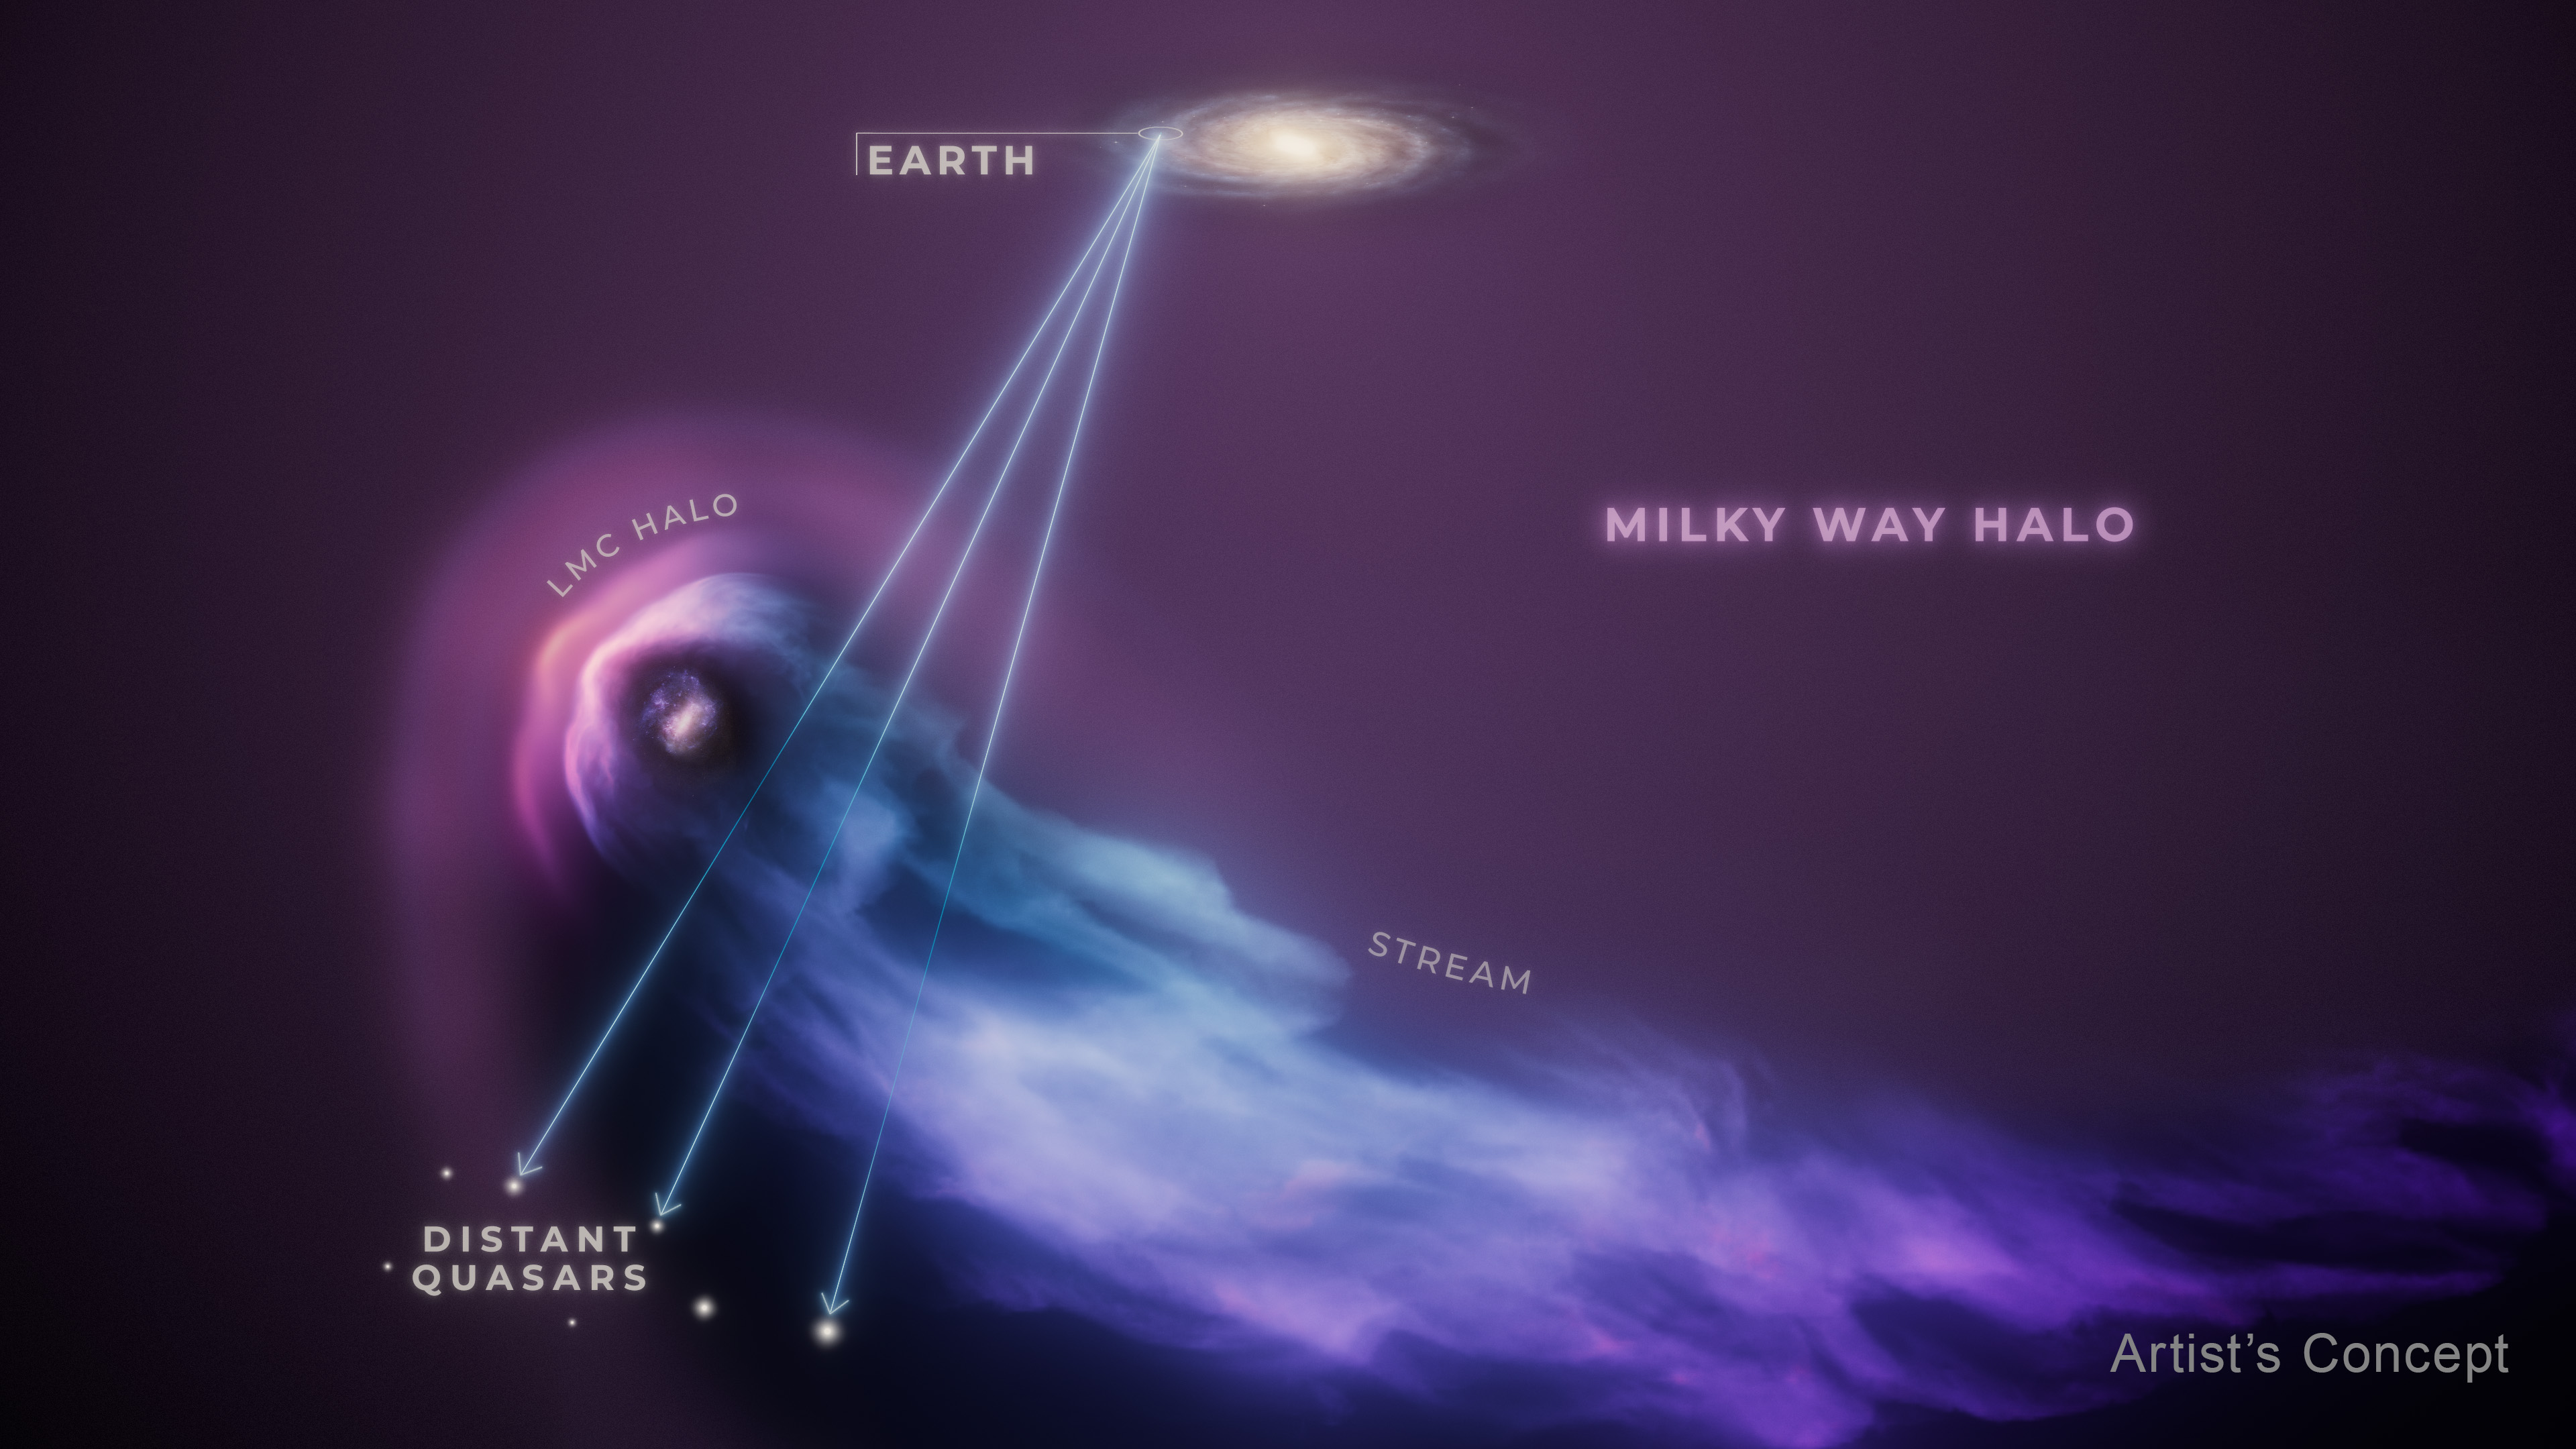

LMC passing through Milky Way halo (artist’s concept)

This artist’s concept shows the Large Magellanic Cloud, or LMC, in the foreground as it passes through the gaseous halo of the much more massive Milky Way galaxy. The encounter has blown away most of the spherical halo of gas that surrounds the LMC, as illustrated by the trailing gas stream reminiscent of a comet’s tail. Still, a compact halo remains, and scientists do not expect this residual halo to be lost. The team surveyed the halo by using the background light of 28 quasars, an exceptionally bright type of active galactic nucleus that shines across the Universe like a lighthouse beacon. Their light allows scientists to ‘see’ the intervening halo gas indirectly through the absorption of the background light. The lines represent the Hubble Space Telescope’s view from its orbit around Earth to the distant quasars through the LMC’s gas.

Credit: NASA, ESA, R. Crawford (STScI)